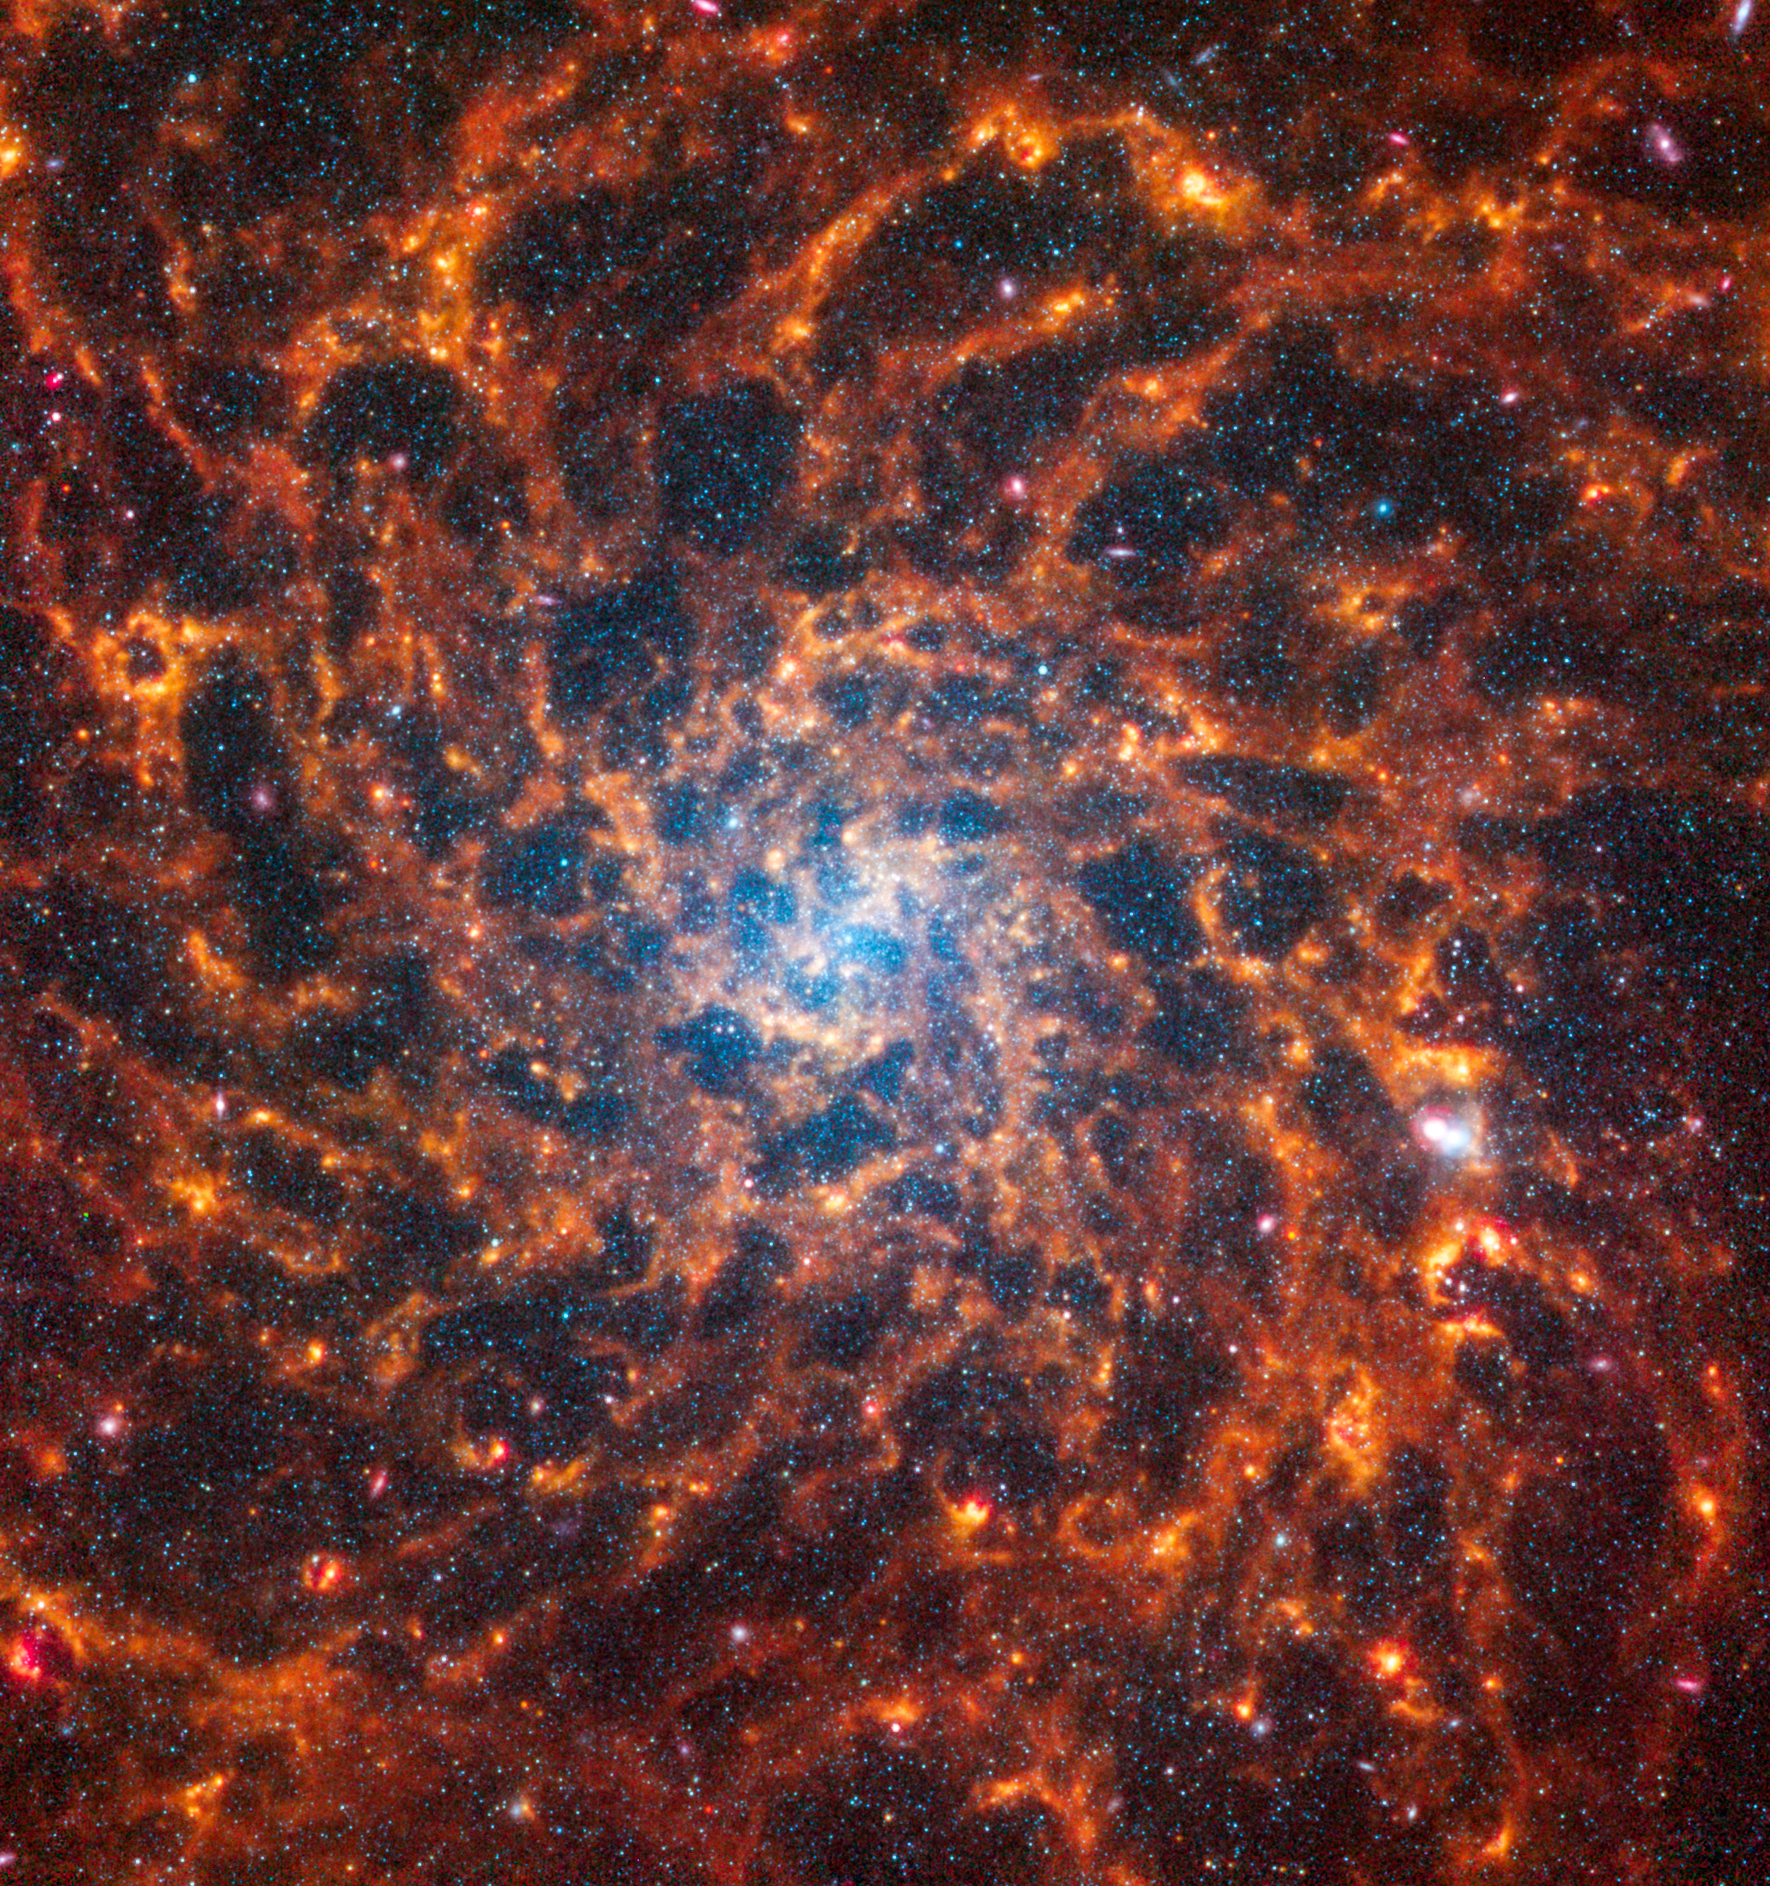

IC 5332

Galaxy IC 5332 was observed as part of the Physics at High Angular resolution in Nearby GalaxieS (PHANGS) program, a large project that includes observations from several space- and ground-based telescopes of many galaxies to help researchers study all phases of the star formation cycle, from the formation of stars within dusty gas clouds to the energy released in the process that creates the intricate structures revealed by Webb’s new images.

IC 5332 is 30 million light-years away in the constellation Sculptor.

Learn more about what can be seen in this vast collection of Webb images here.

Credit: NASA, ESA, CSA, STScI, J. Lee (STScI), T. Williams (Oxford), R. Chandar (UToledo), PHANGS Team